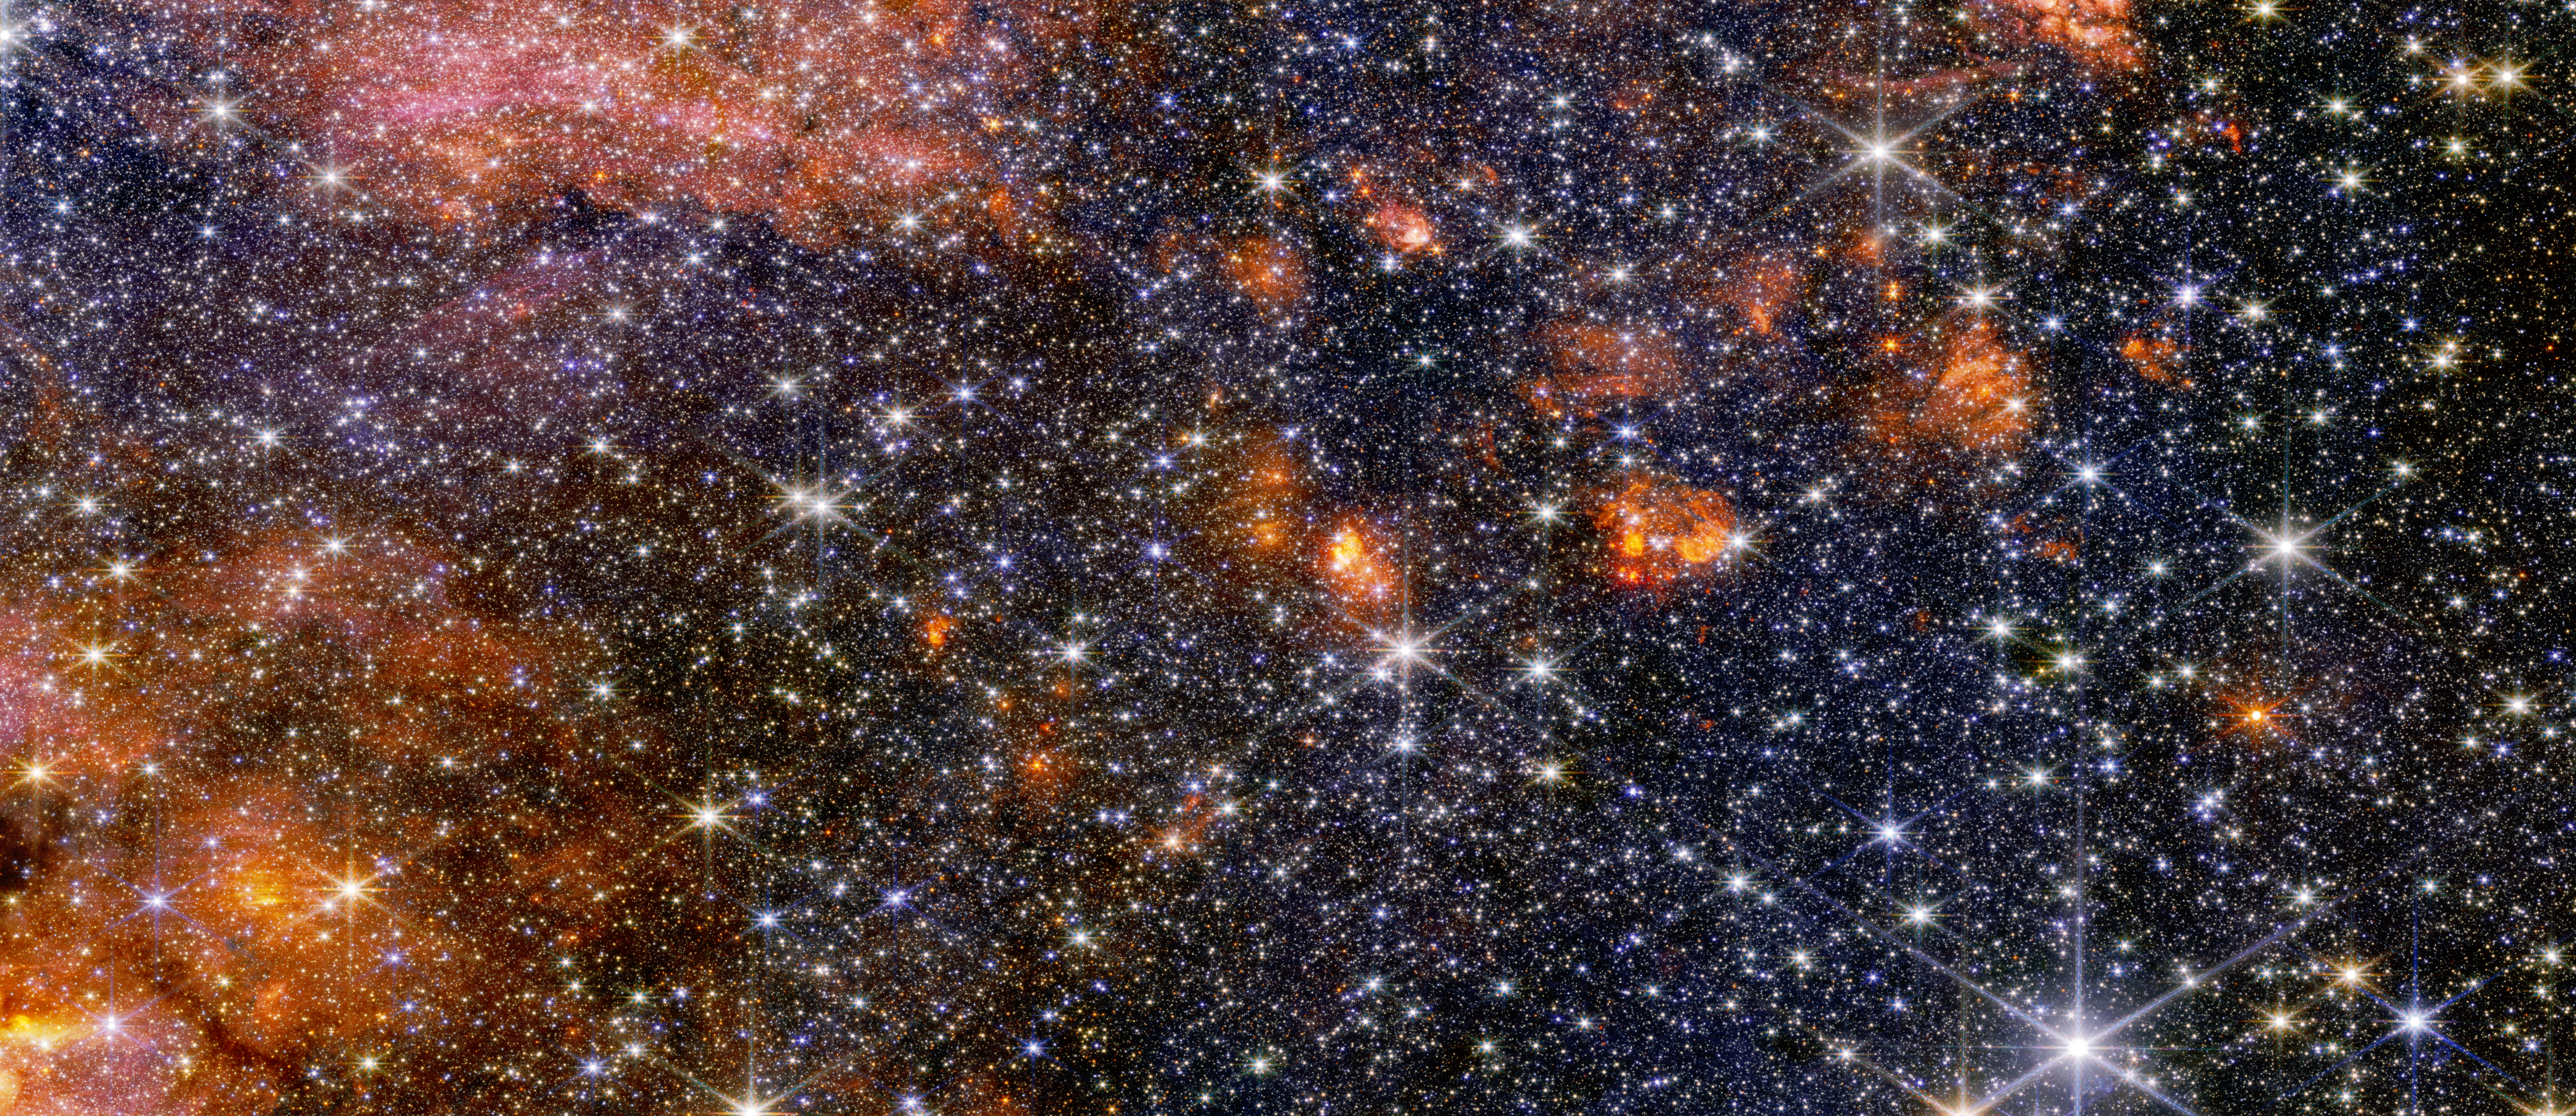

Sagittarius B2 (NIRCam image)

Stars, gas and cosmic dust in the Sagittarius B2 molecular cloud glow in near-infrared light, captured by Webb’s NIRCam (Near-Infrared Camera). In this light, astronomers see more of the region’s diverse, colourful stars, but less of its gas and dust structure. Webb’s instruments each provide astronomers with important information that help build a more complete picture of what is happening in this intriguing portion of the centre of our galaxy.

Credit: NASA, ESA, CSA, STScI, A. Ginsburg (University of Florida), N. Budaiev (University of Florida), T. Yoo (University of Florida). Image processing: A. Pagan (STScI)